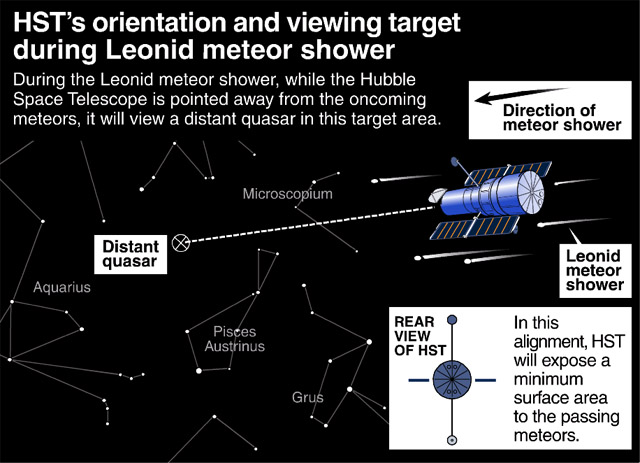

HST's orientation and viewing target during Leonid meteor shower

The anticipated celestial bombardment called the Leonid meteor storm on the afternoon of November 17th (EST) won't deter the NASA/ESA Hubble Space Telescope from its key mission of gazing far across the universe -- as long as the view is in the opposite direction of the incoming meteor swarm.

Credit: Space Telescope Science Institute (STScI)